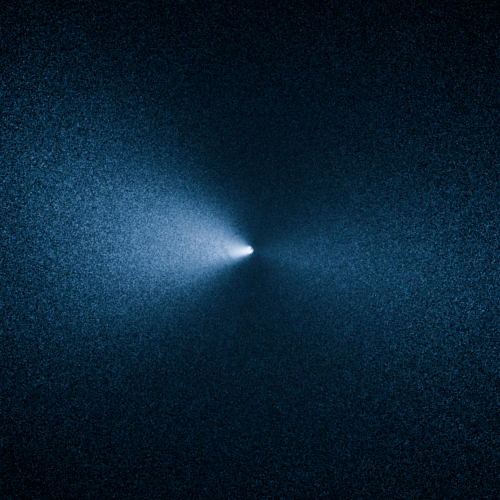

Comet 252P/LINEAR

This image taken by the NASA/ESA Hubble Space Telescope shows Comet 252P/LINEAR as it passed by Earth. The visit was one of the closest encounters between a comet and our planet.

Credit: NASA, ESA, and J.-Y. Li (Planetary Science Institute)